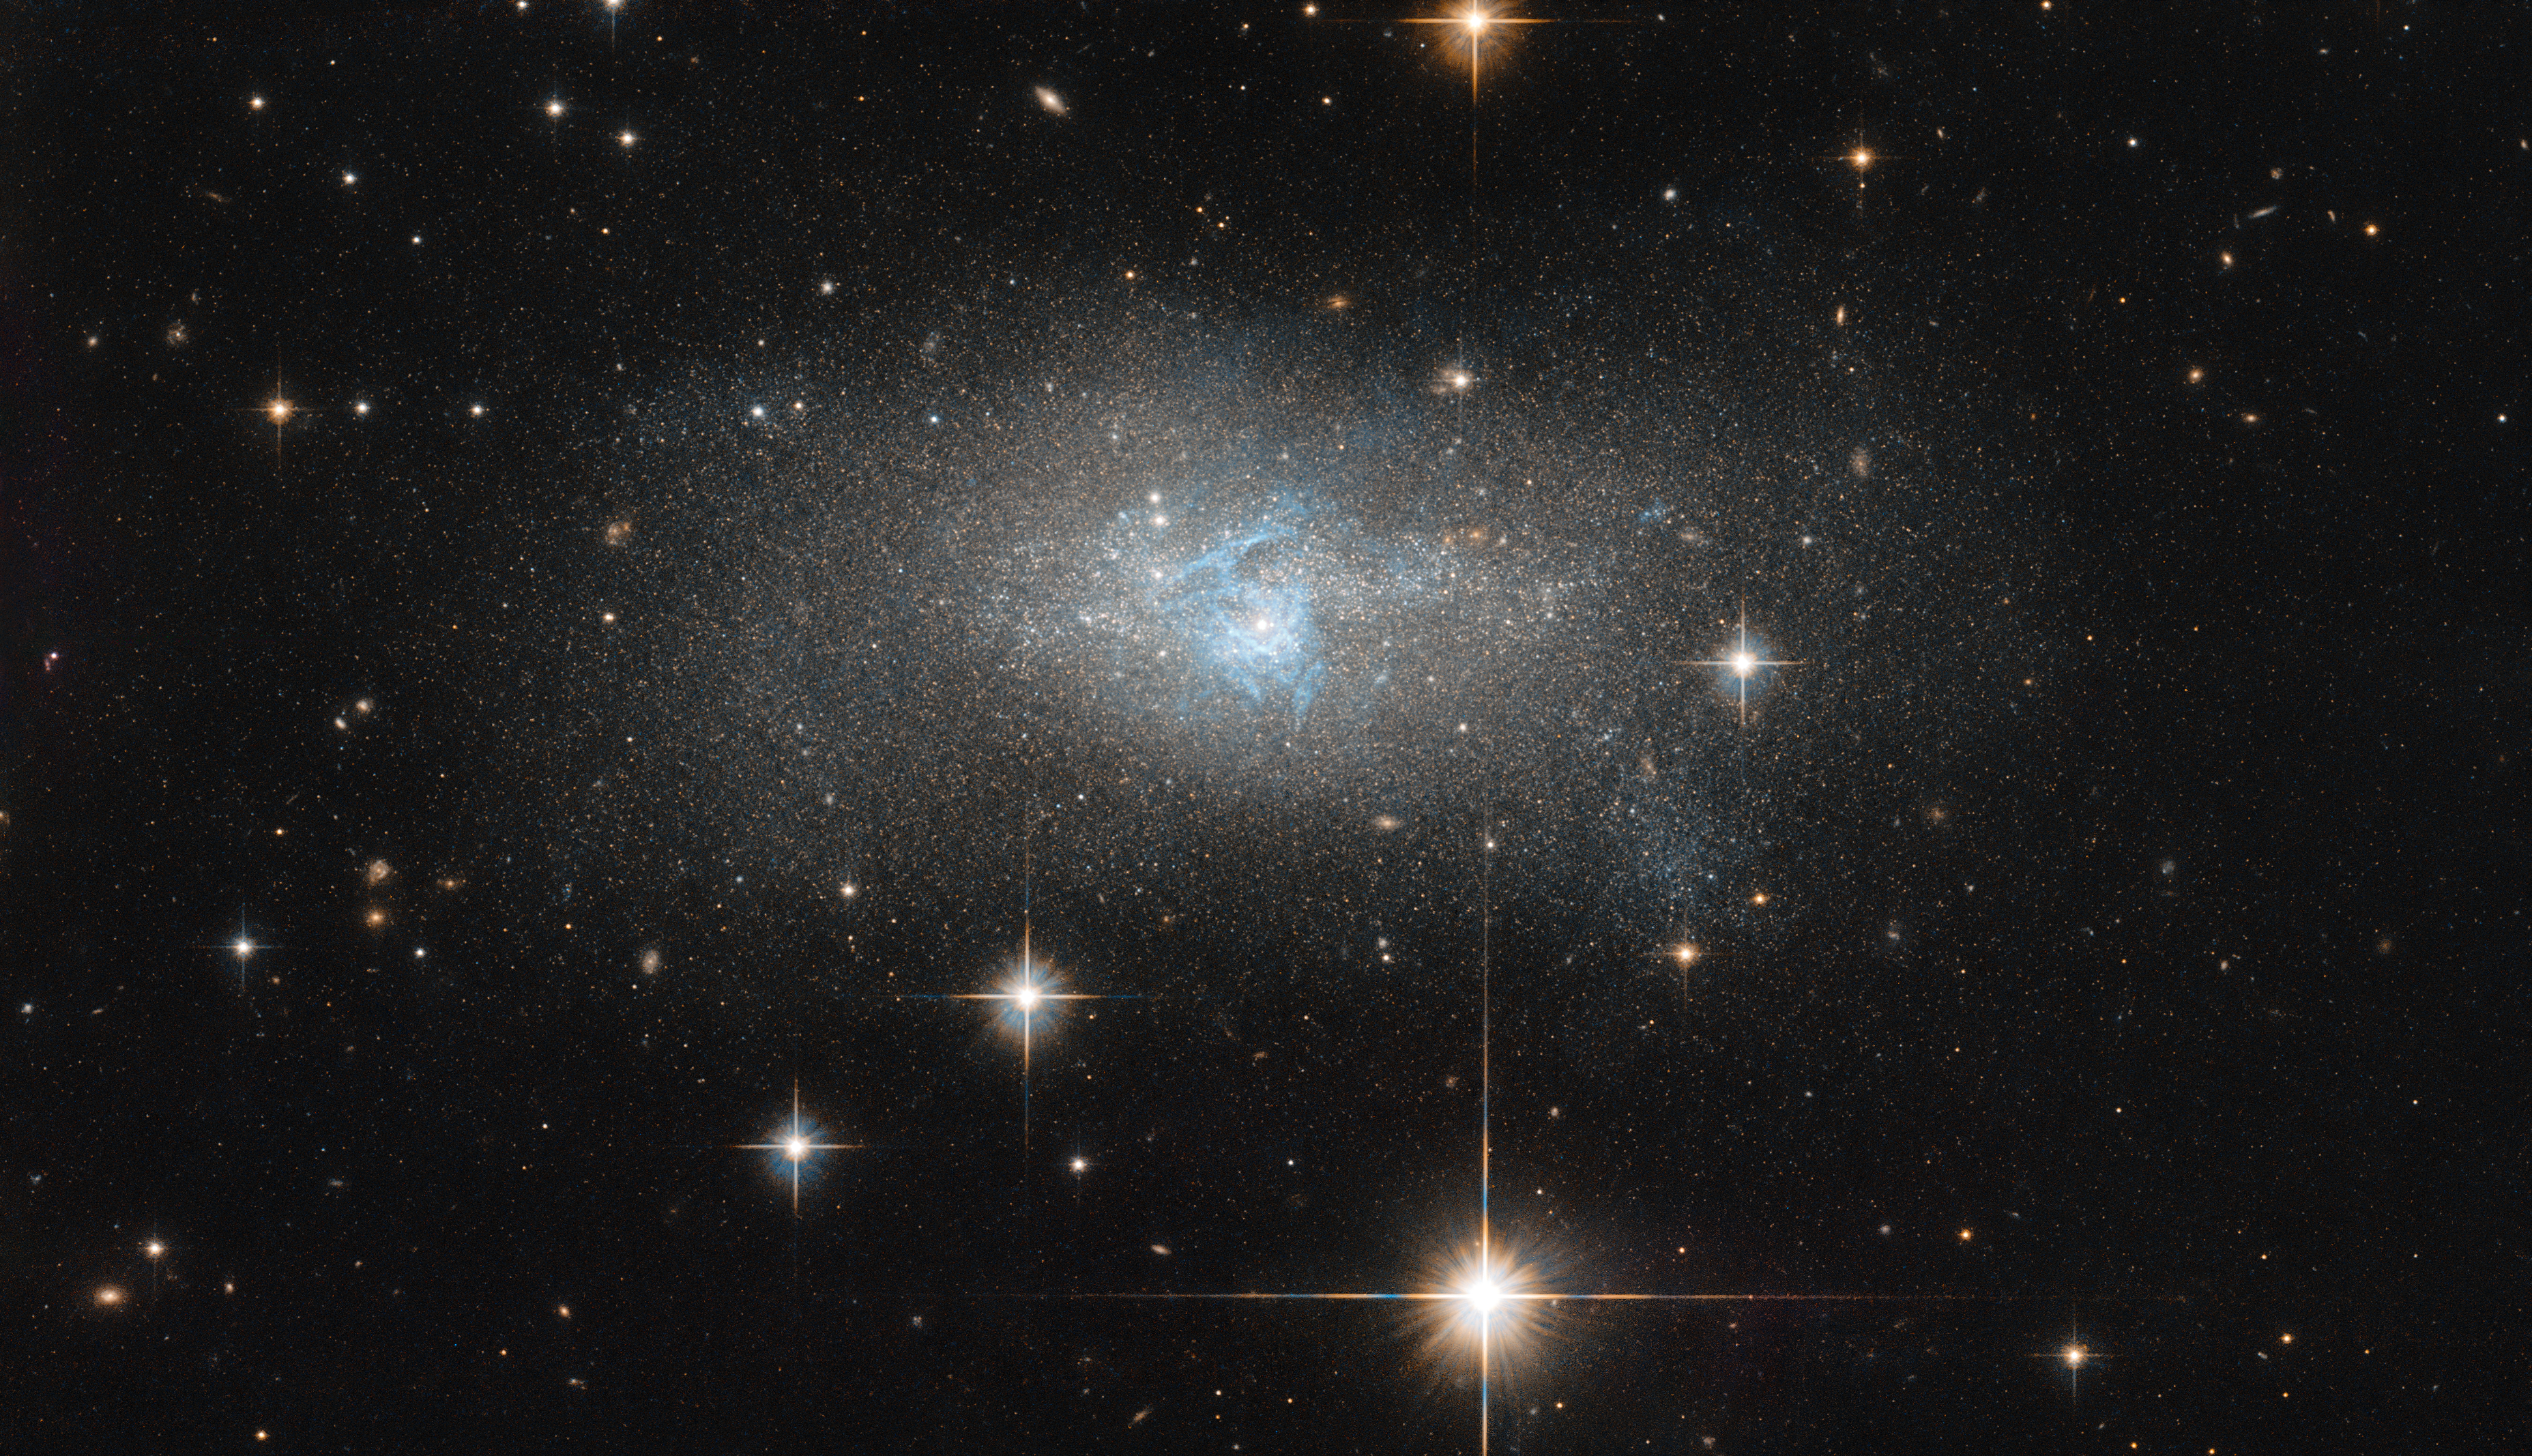

Threads of blue

A ripple of bright blue threads through this galaxy like a misshapen lake system. The foreground of this image is littered with nearby stars with their gleaming diffraction spikes. A keen eye can also spot a few other galaxies that, while masquerading as stars at first glance, reveal their true nature on closer inspection.

The central galaxy streaked with colour, IC 4870, was discovered by DeLisle Stewart in 1900 and is located approximately 28 million light-years away. It contains an active galactic nucleus, or AGN: an extremely luminous central region so alight with radiation that it can outshine the rest of the galaxy put together. AGNs emit radiation across the complete electromagnetic spectrum, from radio waves to gamma-rays, produced by the action of a central supermassive black hole that is devouring material getting too close to it. IC 4870 is also a Seyfert galaxy, a particular kind of AGN with characteristic emission lines.

IC 4870 has been imaged by Hubble for several studies of nearby active galaxies. By using Hubble to explore the small-scale structures of AGN in nearby galaxies, astronomers can observe the traces of collisions and mergers, central galactic bars, nuclear starbursts, jets or outflows, and other interactions between a galactic nucleus and its surrounding environment. Images such as this can help astronomers understand more about the true nature of the galaxies we see throughout the cosmos.

Credit: ESA/Hubble & NASA